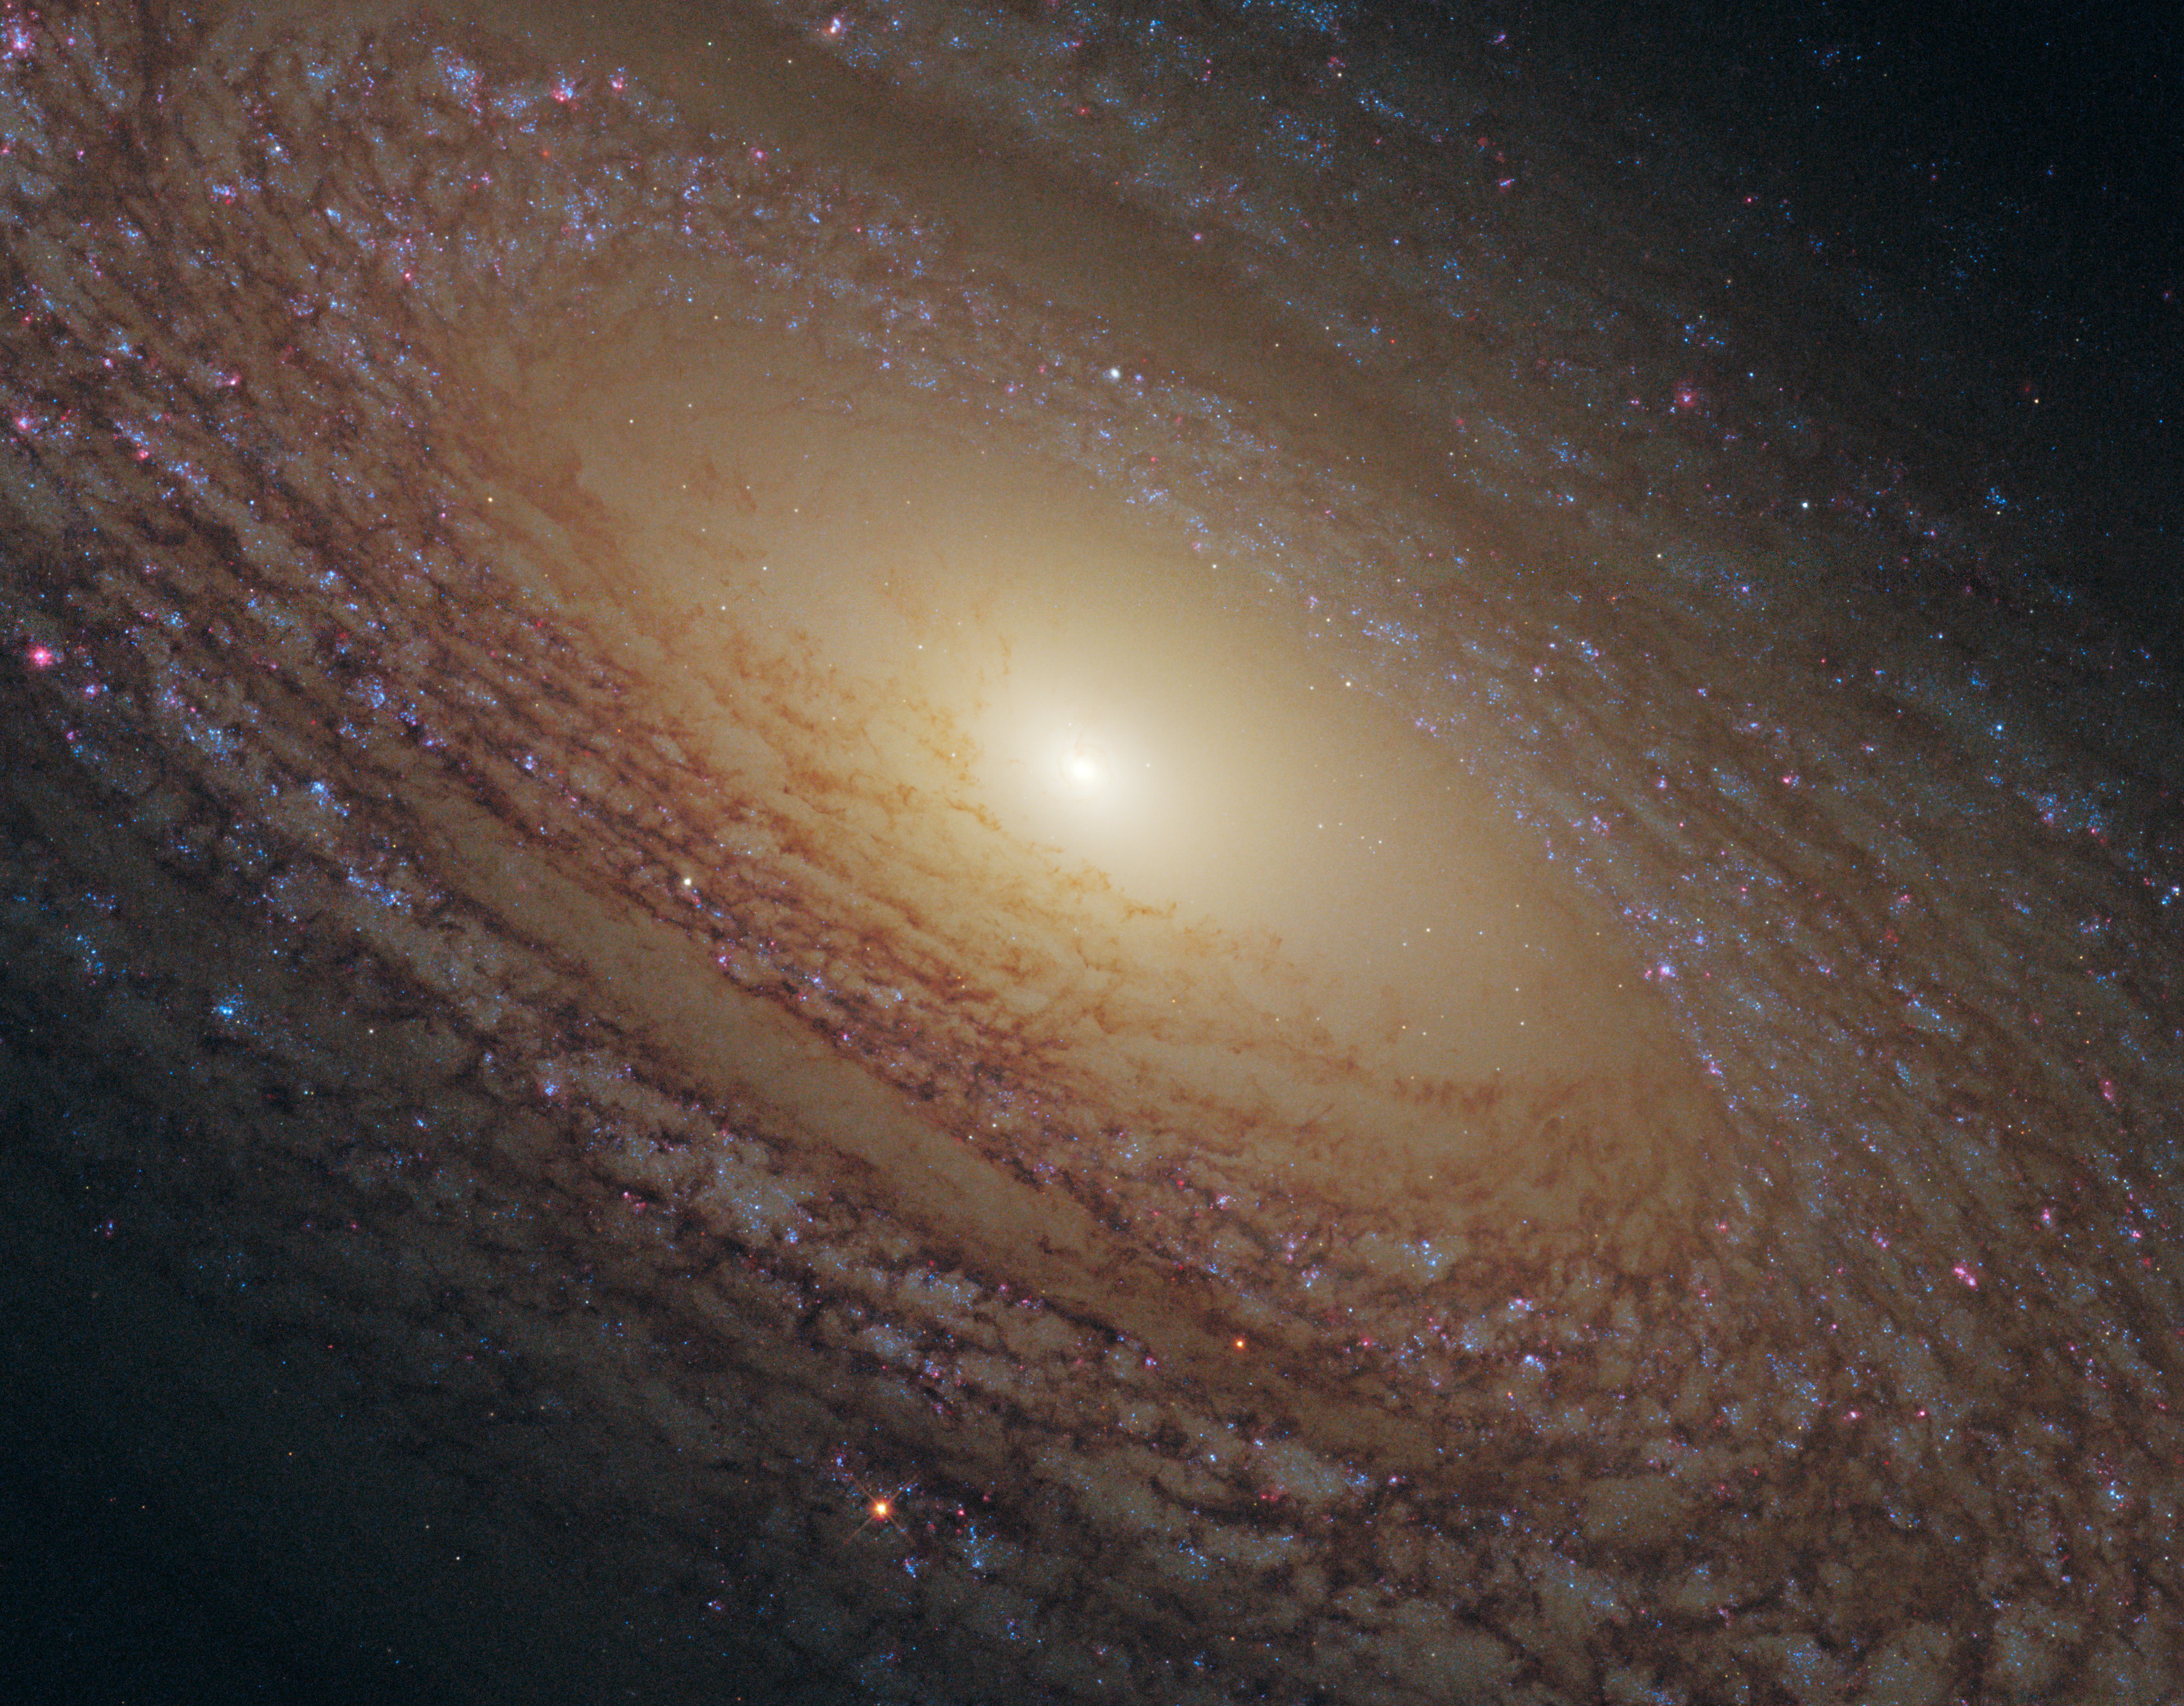

Flocculent spiral NGC 2841

Star formation is one of the most important processes in shaping the Universe; it plays a pivotal role in the evolution of galaxies and it is also in the earliest stages of star formation that planetary systems first appear.

Yet there is still much that astronomers don’t understand, such as how do the properties of stellar nurseries vary according to the composition and density of gas present, and what triggers star formation in the first place? The driving force behind star formation is particularly unclear for a type of galaxy called a flocculent spiral, such as NGC 2841 shown here, which features short spiral arms rather than prominent and well-defined galactic limbs.

Credit: NASA, ESA and the Hubble Heritage (STScI/AURA)-ESA/Hubble Collaboration Acknowledgment: M. Crockett and S. Kaviraj (Oxford University, UK), R. O'Connell (University of Virginia), B. Whitmore (STScI) and the WFC3 Scientific Oversight Committee.